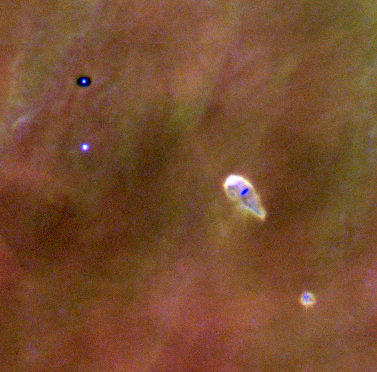

Proplyds in the Orion Nebula

This picture shows glowing protoplanetary disks (first discovered with the Hubble in 1992, and dubbed "proplyds") that are believed to be embryonic solar systems that will eventually form planets. (Our solar system has long been considered the relic of just such a disk that formed around the newborn Sun). The abundance of such objects in the Orion nebula strengthens the argument that planet formation is a common occurrence in the universe.

Credit: NASA, C.R. O'Dell and S.K. Wong (Rice University)